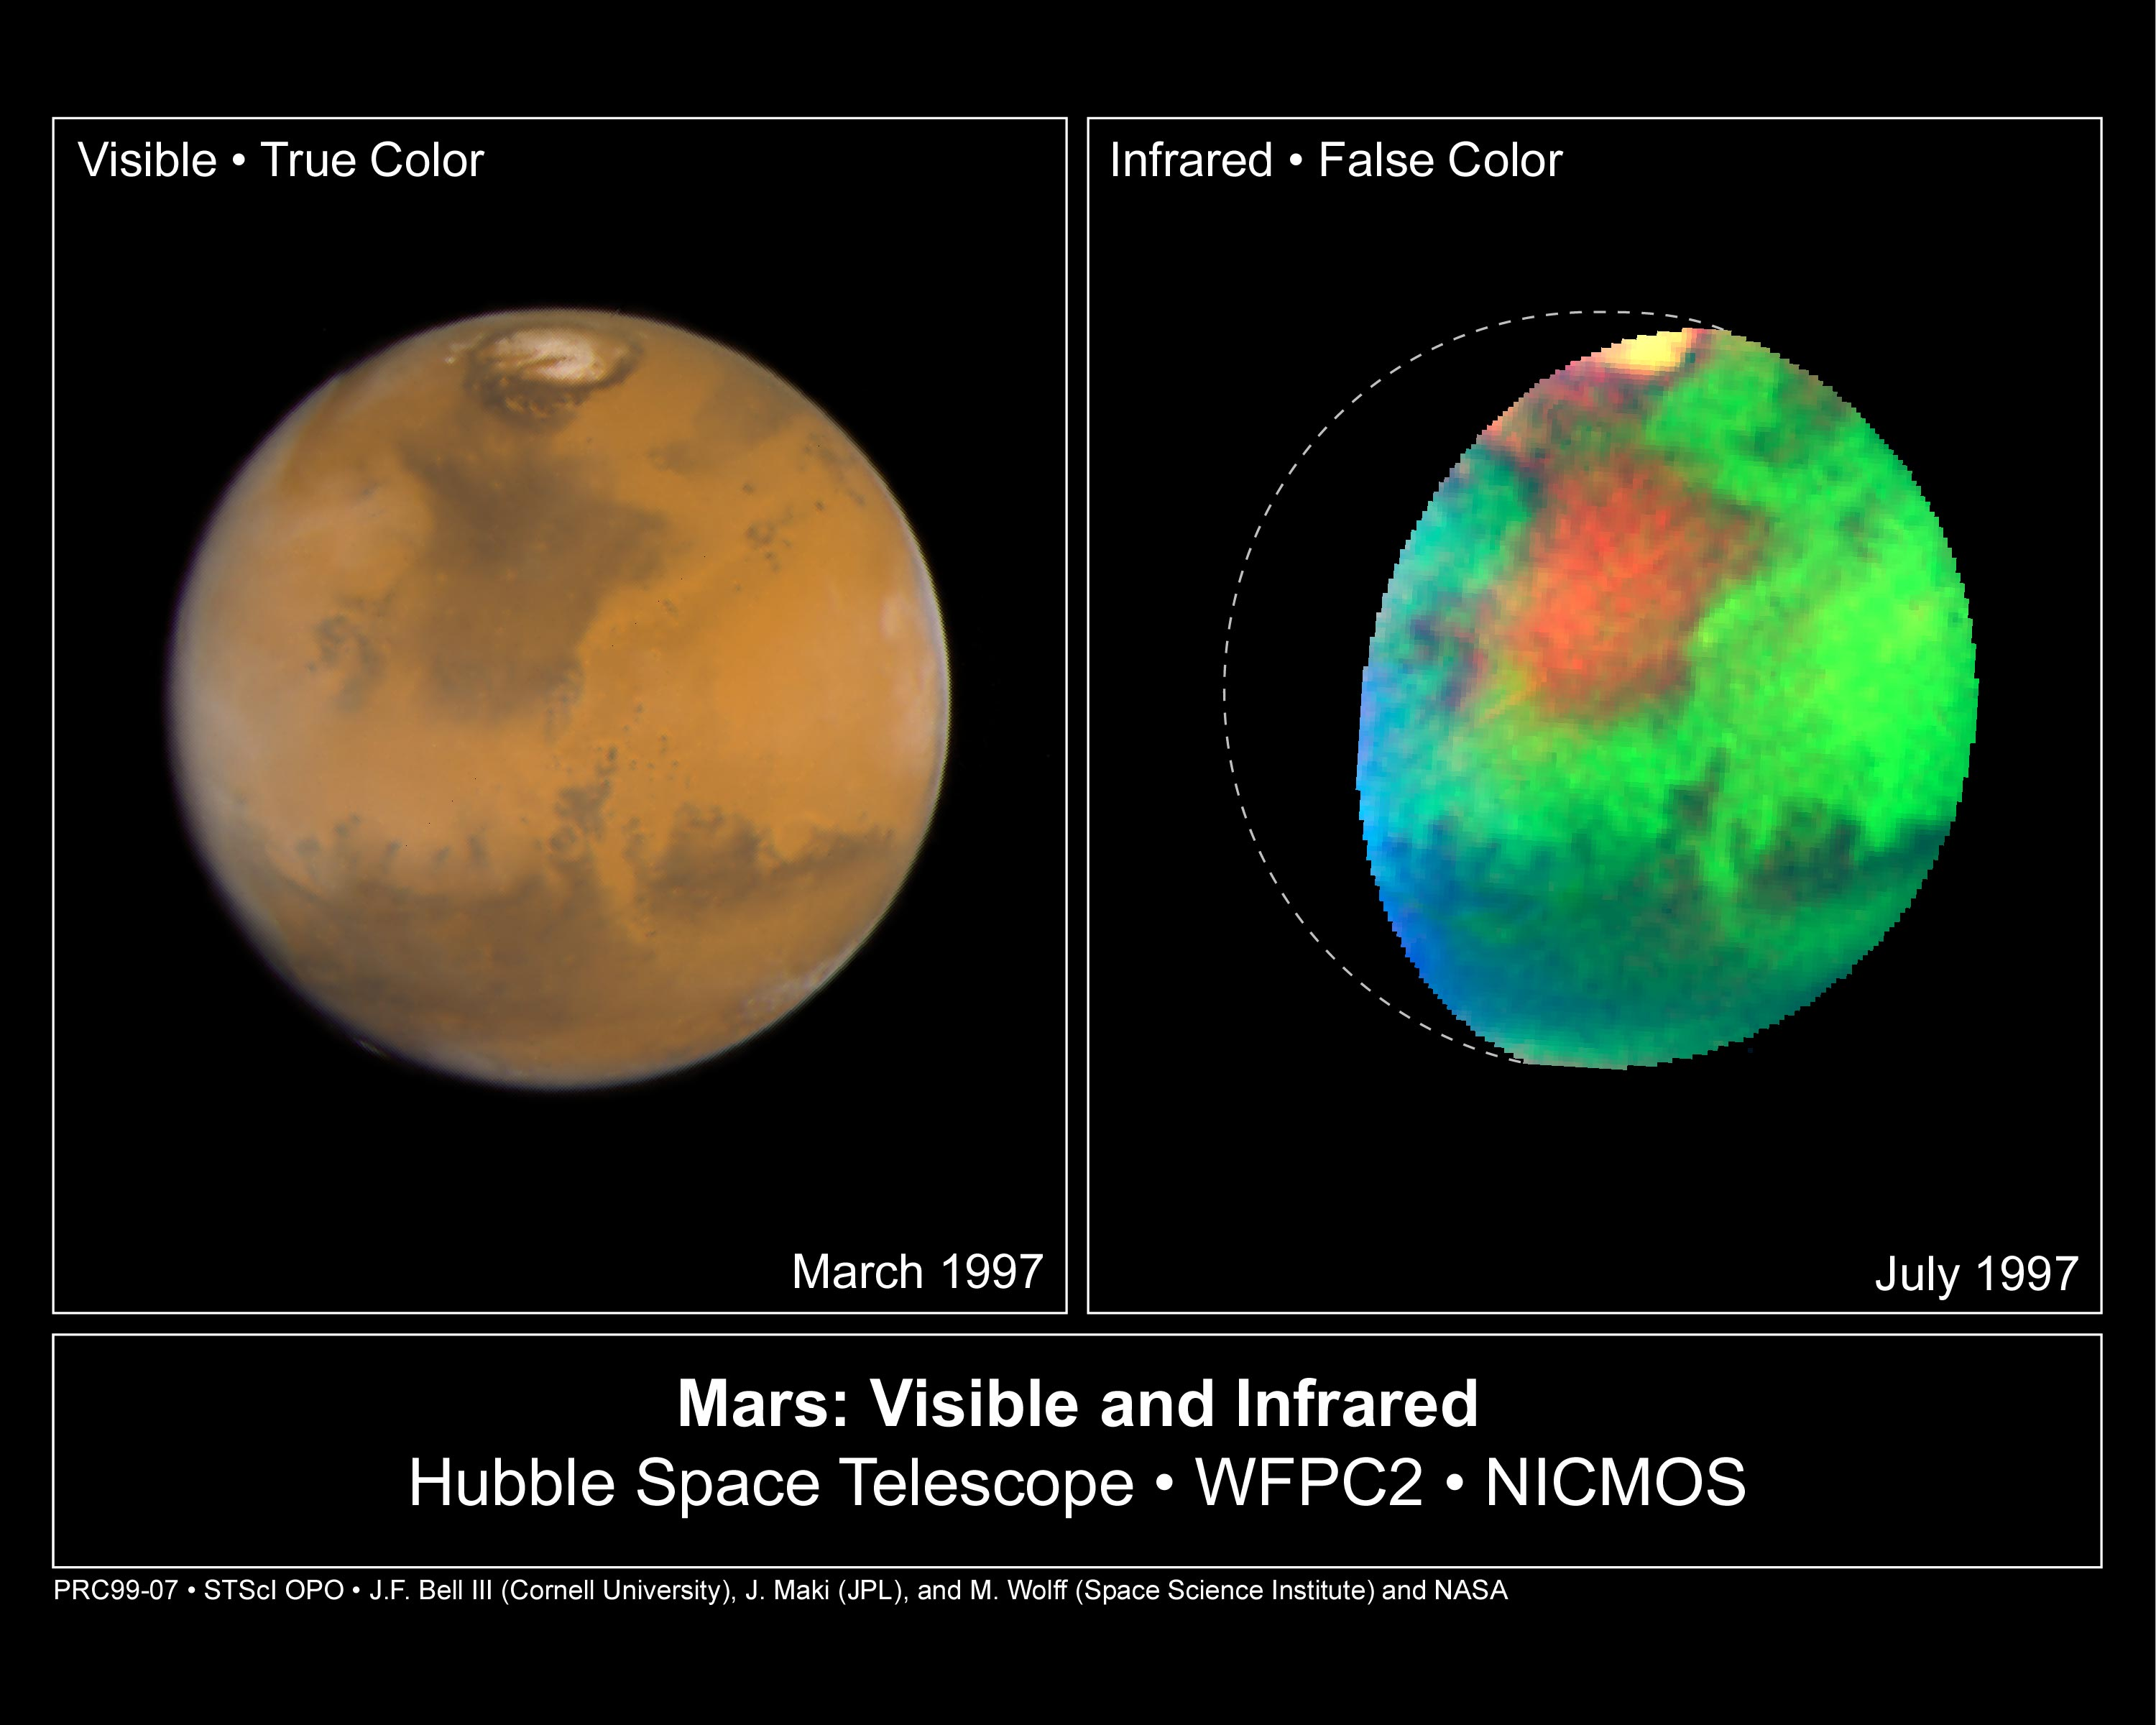

Martian colours Provide Clues About Martian Water (Hubble NICMOS and WFPC2 Views)

NASA/ESA Hubble Space Telescope images of Mars taken in visible and infrared light detail a rich geologic history and provide further evidence for water-bearing minerals on the planet's surface.

Credit: Jim Bell (Cornell University), Justin Maki (JPL), and Mike Wolff (Space Sciences Institute) and NASA/ESA